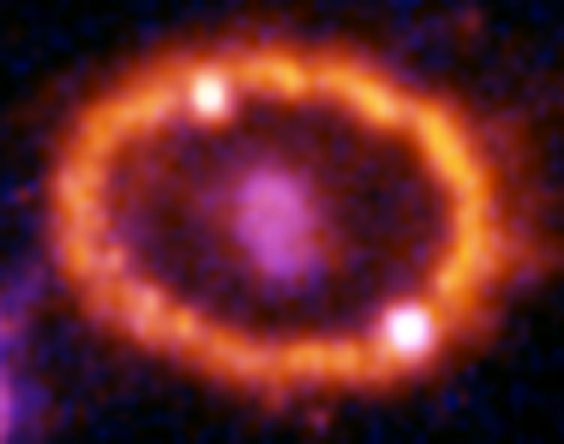

Hubble Supernova 1987A Scrapbook (1994-2003) - Image 8

in 1987, astronomers spotted the brightest stellar explosion ever seen since the one observed by Johannes Kepler over 400 years ago. Called SN 1987A, the titanic supernova explosion blazed with the power of 100,000,000 suns for several months following its discovery on Feb. 23 of that year. Although the supernova itself is over a million times fainter than when it was first discovered, a new light show in the space surrounding it is just beginning.

Credit: NASA/ESA, P. Challis, R. Kirshner (Harvard-Smithsonian Center for Astrophysics) and B. Sugerman (STScI)